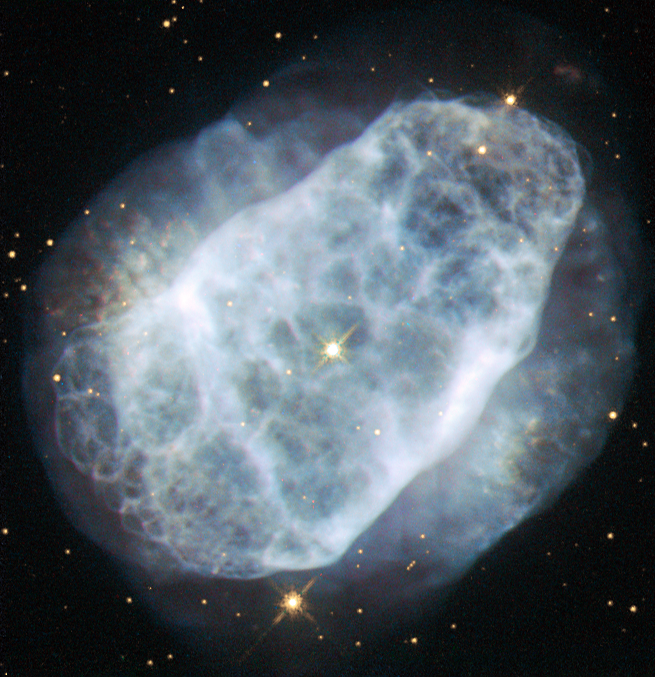

A nitrogen-rich nebula

This NASA/ESA Hubble Space Telescope image shows a planetary nebula named NGC 6153, located about 4000 light-years away in the southern constellation of Scorpius (The Scorpion). The faint blue haze across the frame shows what remains of a star like the Sun after it has depleted most of its fuel. When this happens, the outer layers of the star are ejected, and get excited and ionised by the energetic ultraviolet light emitted by the bright hot core of the star, forming the nebula.

NGC 6153 is a planetary nebula that is elliptical in shape, with an extremely rich network of loops and filaments, shown clearly in this Hubble image. However, this is not what makes this planetary nebula so interesting for astronomers.

Measurements show that NGC 6153 contains large amounts of neon, argon, oxygen, carbon and chlorine — up to three times more than can be found in the Solar System. The nebula contains a whopping five times more nitrogen than the Sun! Although it may be that the star developed higher levels of these elements as it grew and evolved, it is more likely that the star originally formed from a cloud of material that already contained lots more of these elements.

A version of this image was entered into the Hubble’s Hidden Treasures image processing competition by contestant Matej Novak.

Credit: ESA/Hubble & NASA Acknowledgement: Matej Novak